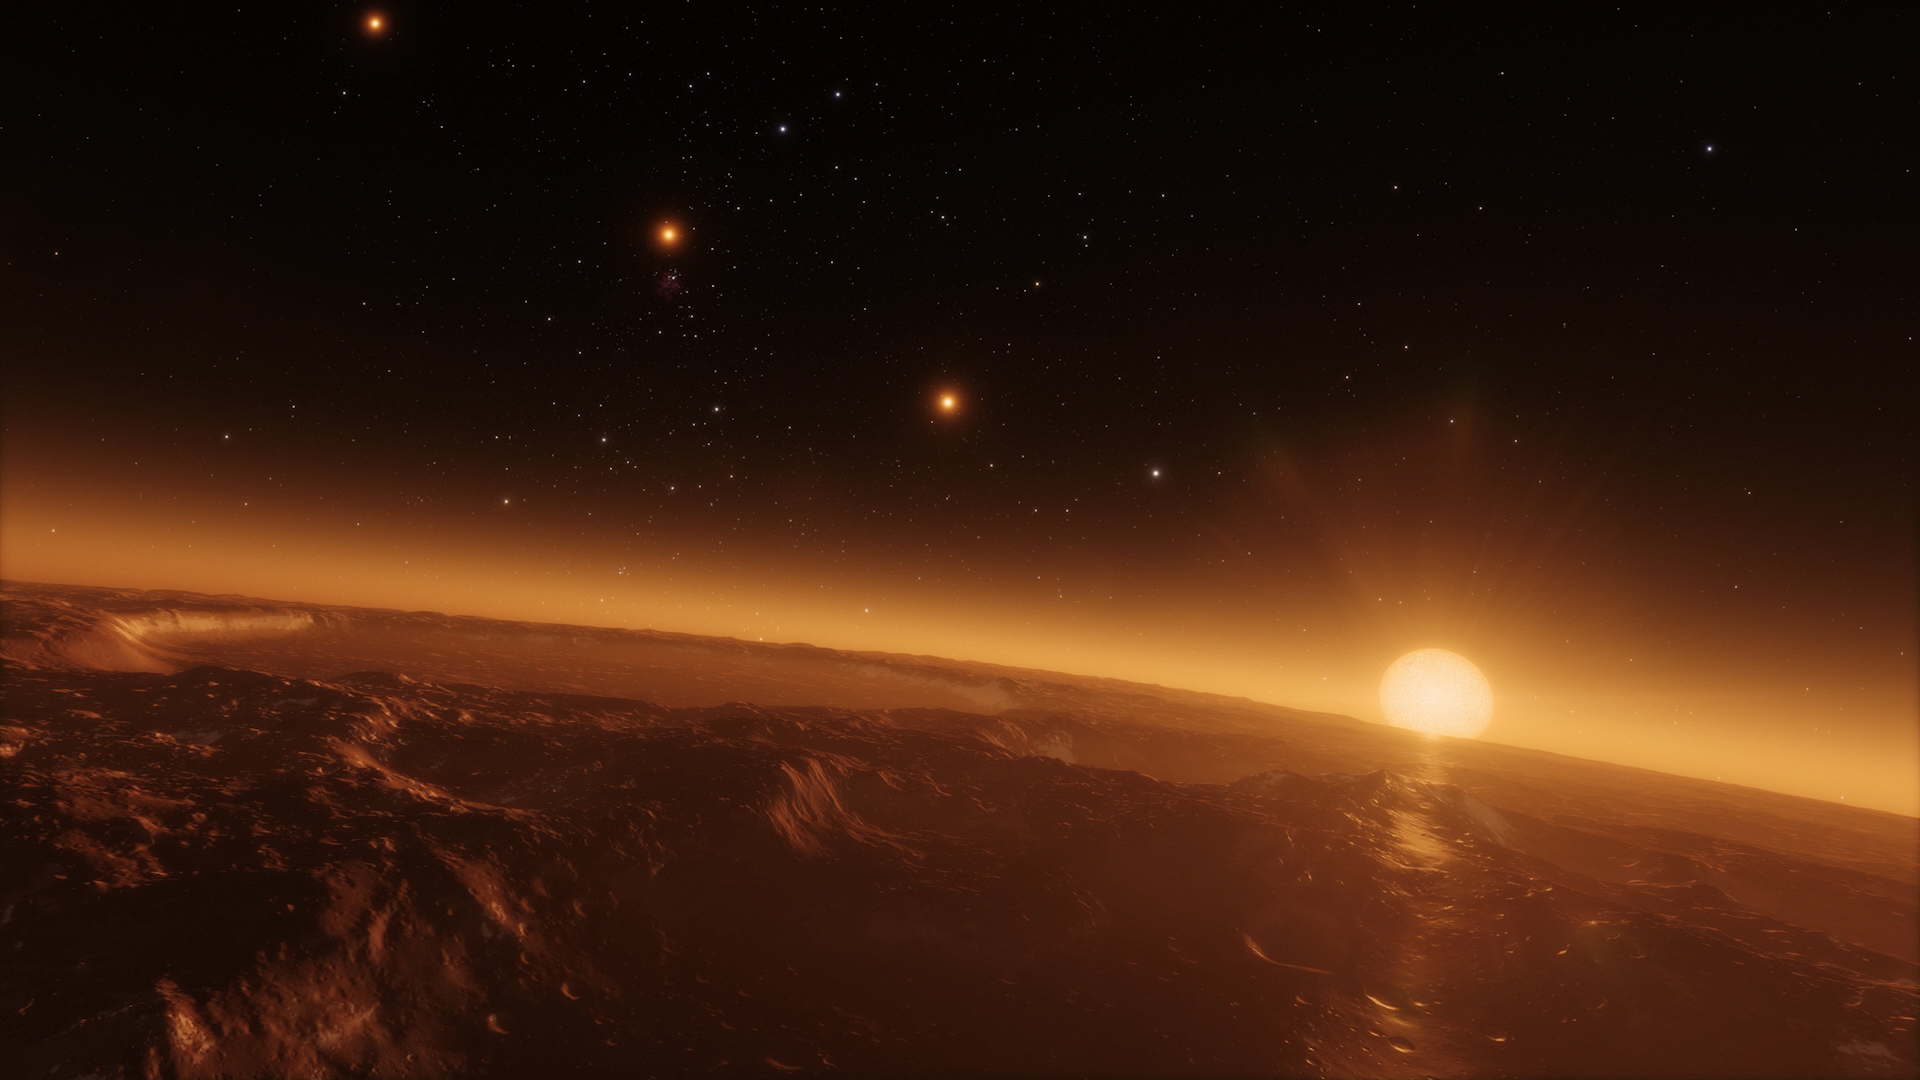

Still from Hubblecast 102: Taking the fingerprints of exoplanets

This is a still from Hubblecast 102.

Credit: ESA/Hubble, NASA